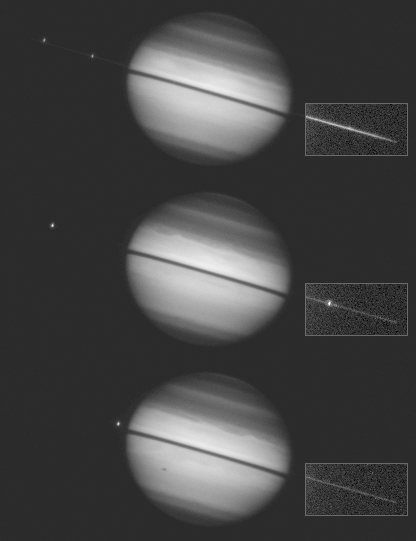

Saturn ring-plane crossing

This sequence of images from the Hubble Space Telescope documents a rare astronomical alignment -- Saturn's magnificent ring system turned edge-on. This occurs when the Earth passes through Saturn's ring plane, as it does approximately every 15 years.

Credit: Amanda S. Bosh (Lowell Observatory), Andrew S. Rivkin (Univ. of Arizona/LPL), the HST High Speed Photometer Instrument Team (R.C. Bless, PI), and NASA/ESA